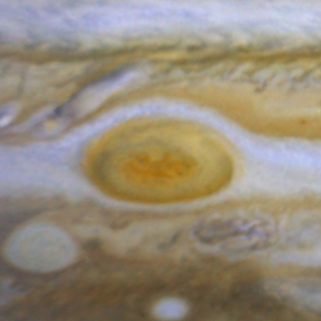

Jupiter's Great Red Spot

When 17th-century astronomers first turned their telescopes to Jupiter, they noted a conspicuous reddish spot on the giant planet. This Great Red Spot is still present in Jupiter's atmosphere, more than 300 years later. It is now known that it is a vast storm, spinning like a cyclone. Unlike a low-pressure hurricane in the Caribbean Sea, however, the Red Spot rotates in a counterclockwise direction in the southern hemisphere, showing that it is a high-pressure system. Winds inside this Jovian storm reach speeds of about 270 mph.

Credit: Hubble Heritage Team (STScI/AURA/NASA/ESA) and Amy Simon (Cornell U.)